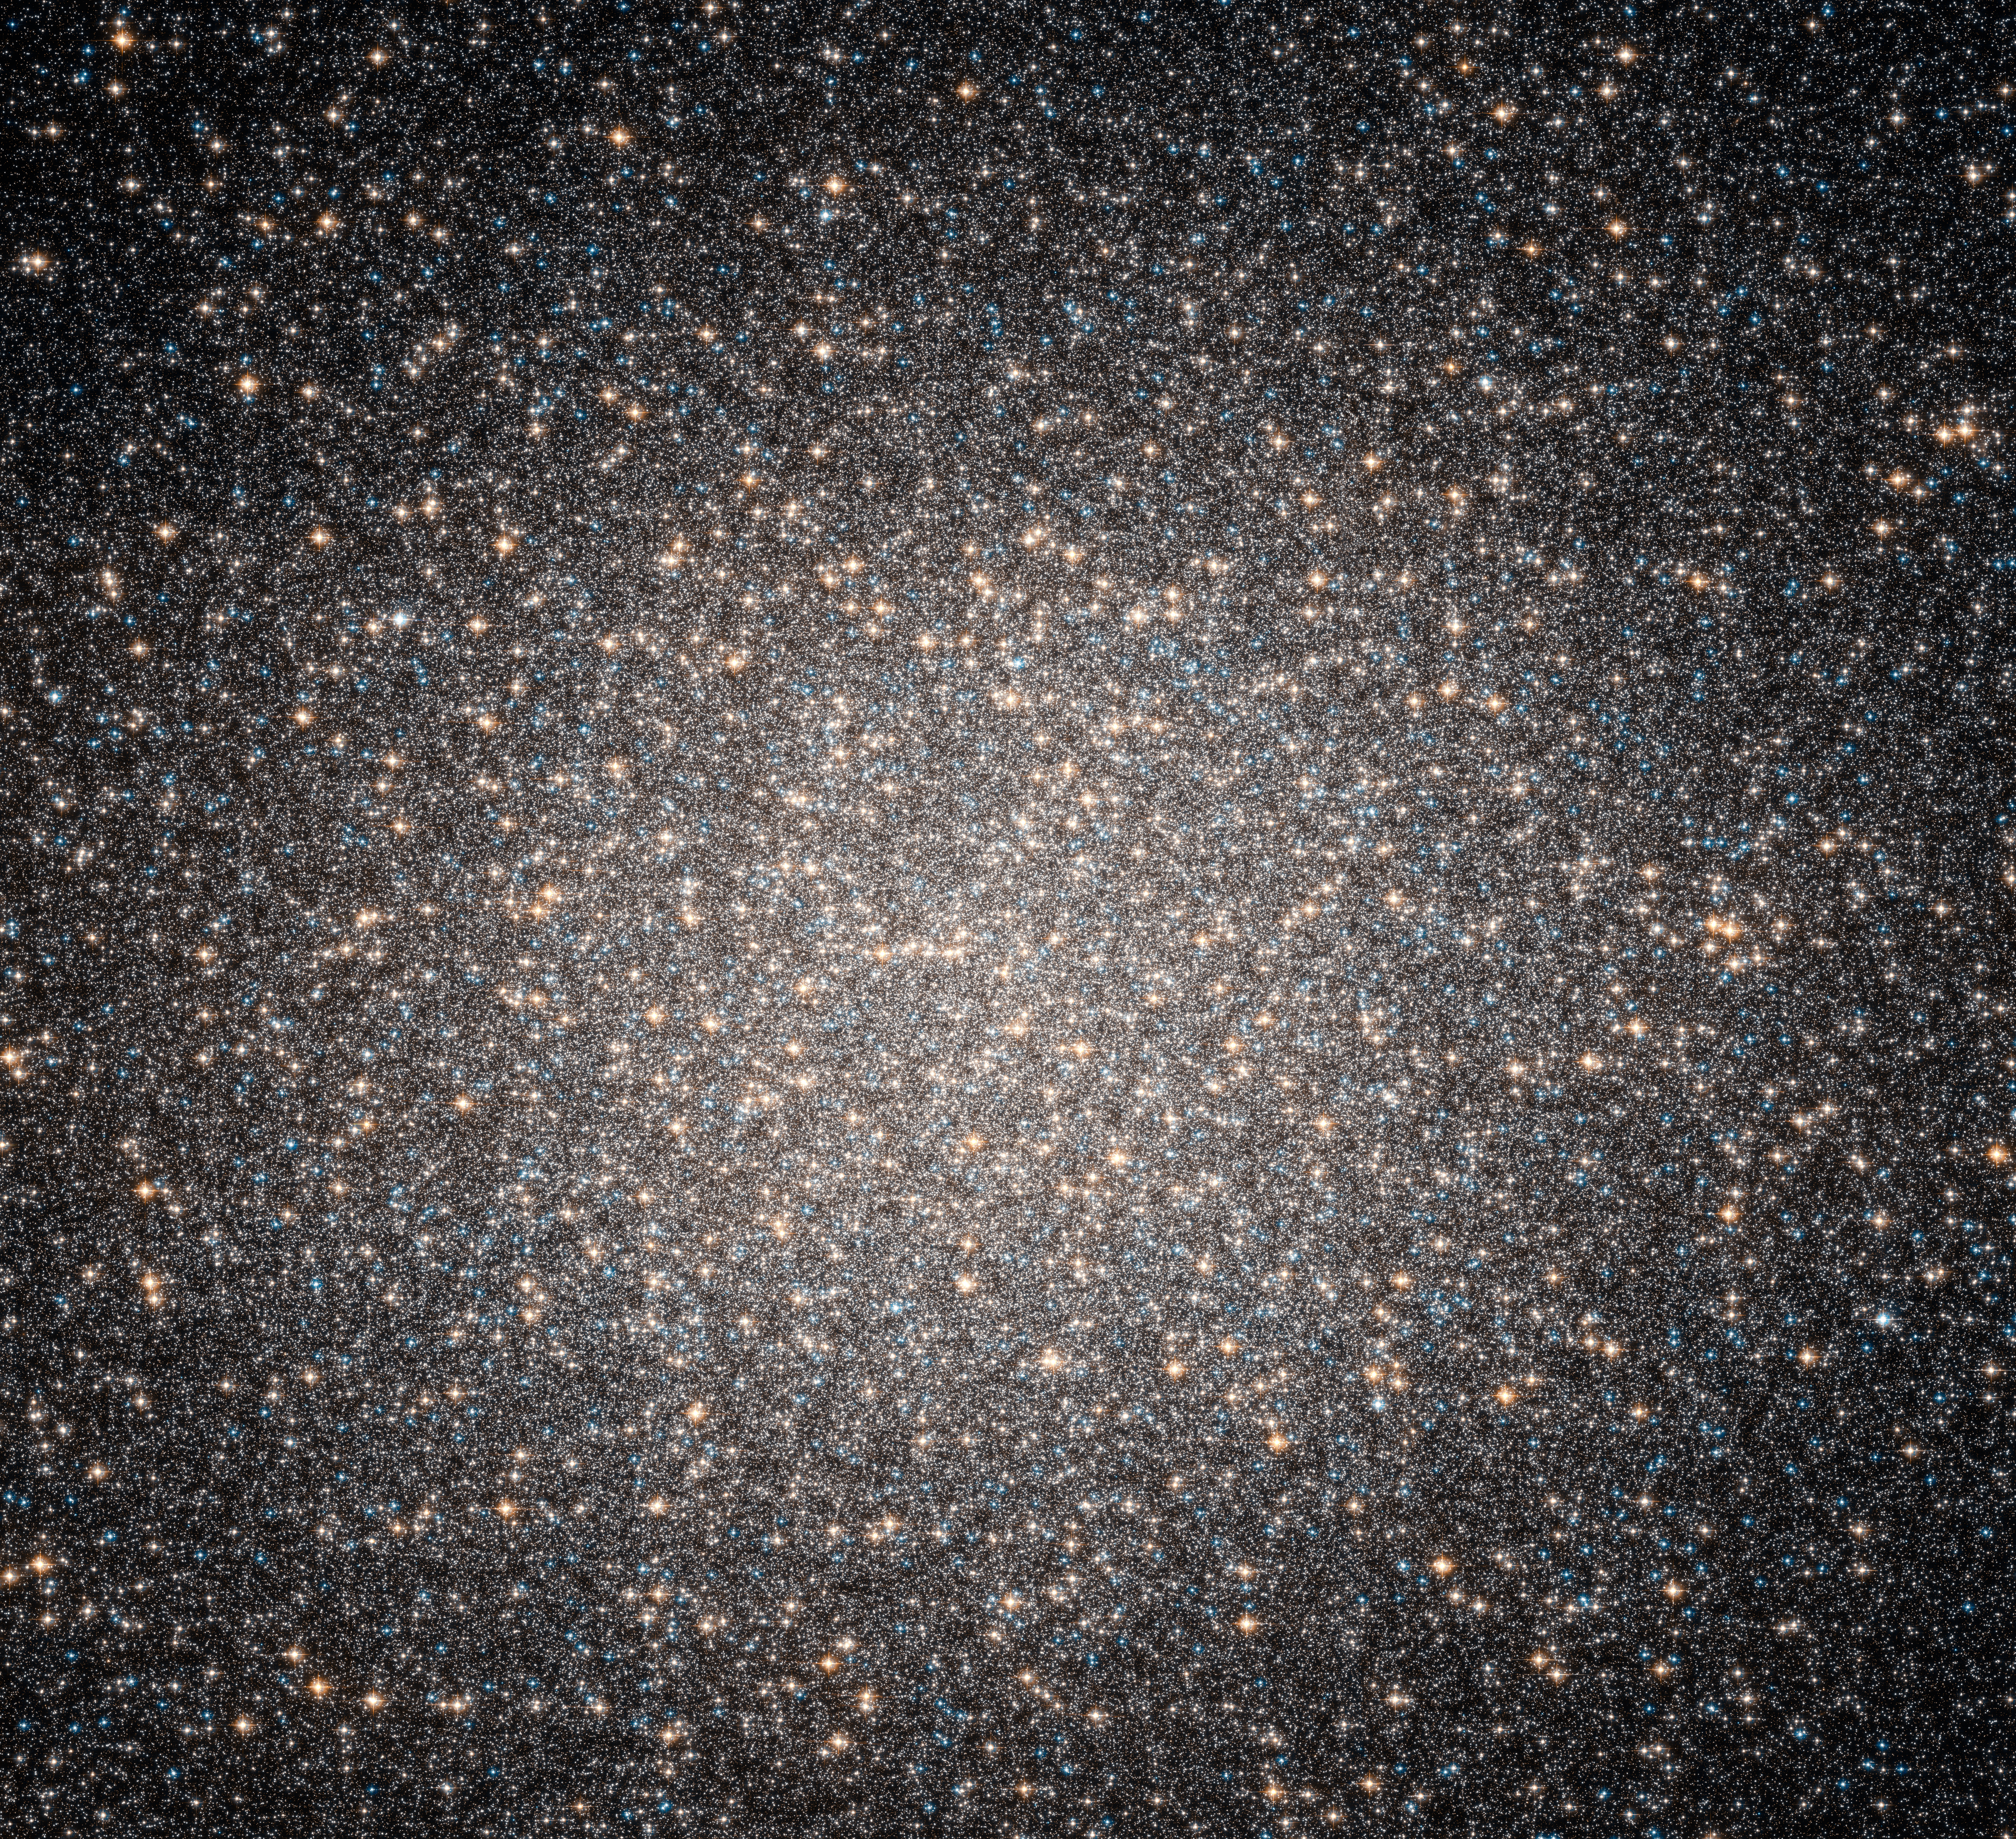

The majestic globular Omega Centauri

A new discovery has resolved some of the mystery surrounding Omega Centauri, the largest and brightest globular cluster in the sky. Images obtained with the Advanced Camera for Surveys onboard the NASA/ESA Hubble Space Telescope and data obtained by the GMOS spectrograph on the Gemini South telescope in Chile show that Omega Centauri appears to harbour an elusive intermediate-mass black hole in its centre.

Credit: NASA, ESA and the Hubble Heritage Team (STScI/AURA) Acknowlegement: A. Cool (San Francisco State Univ.) and J. Anderson (STScI)